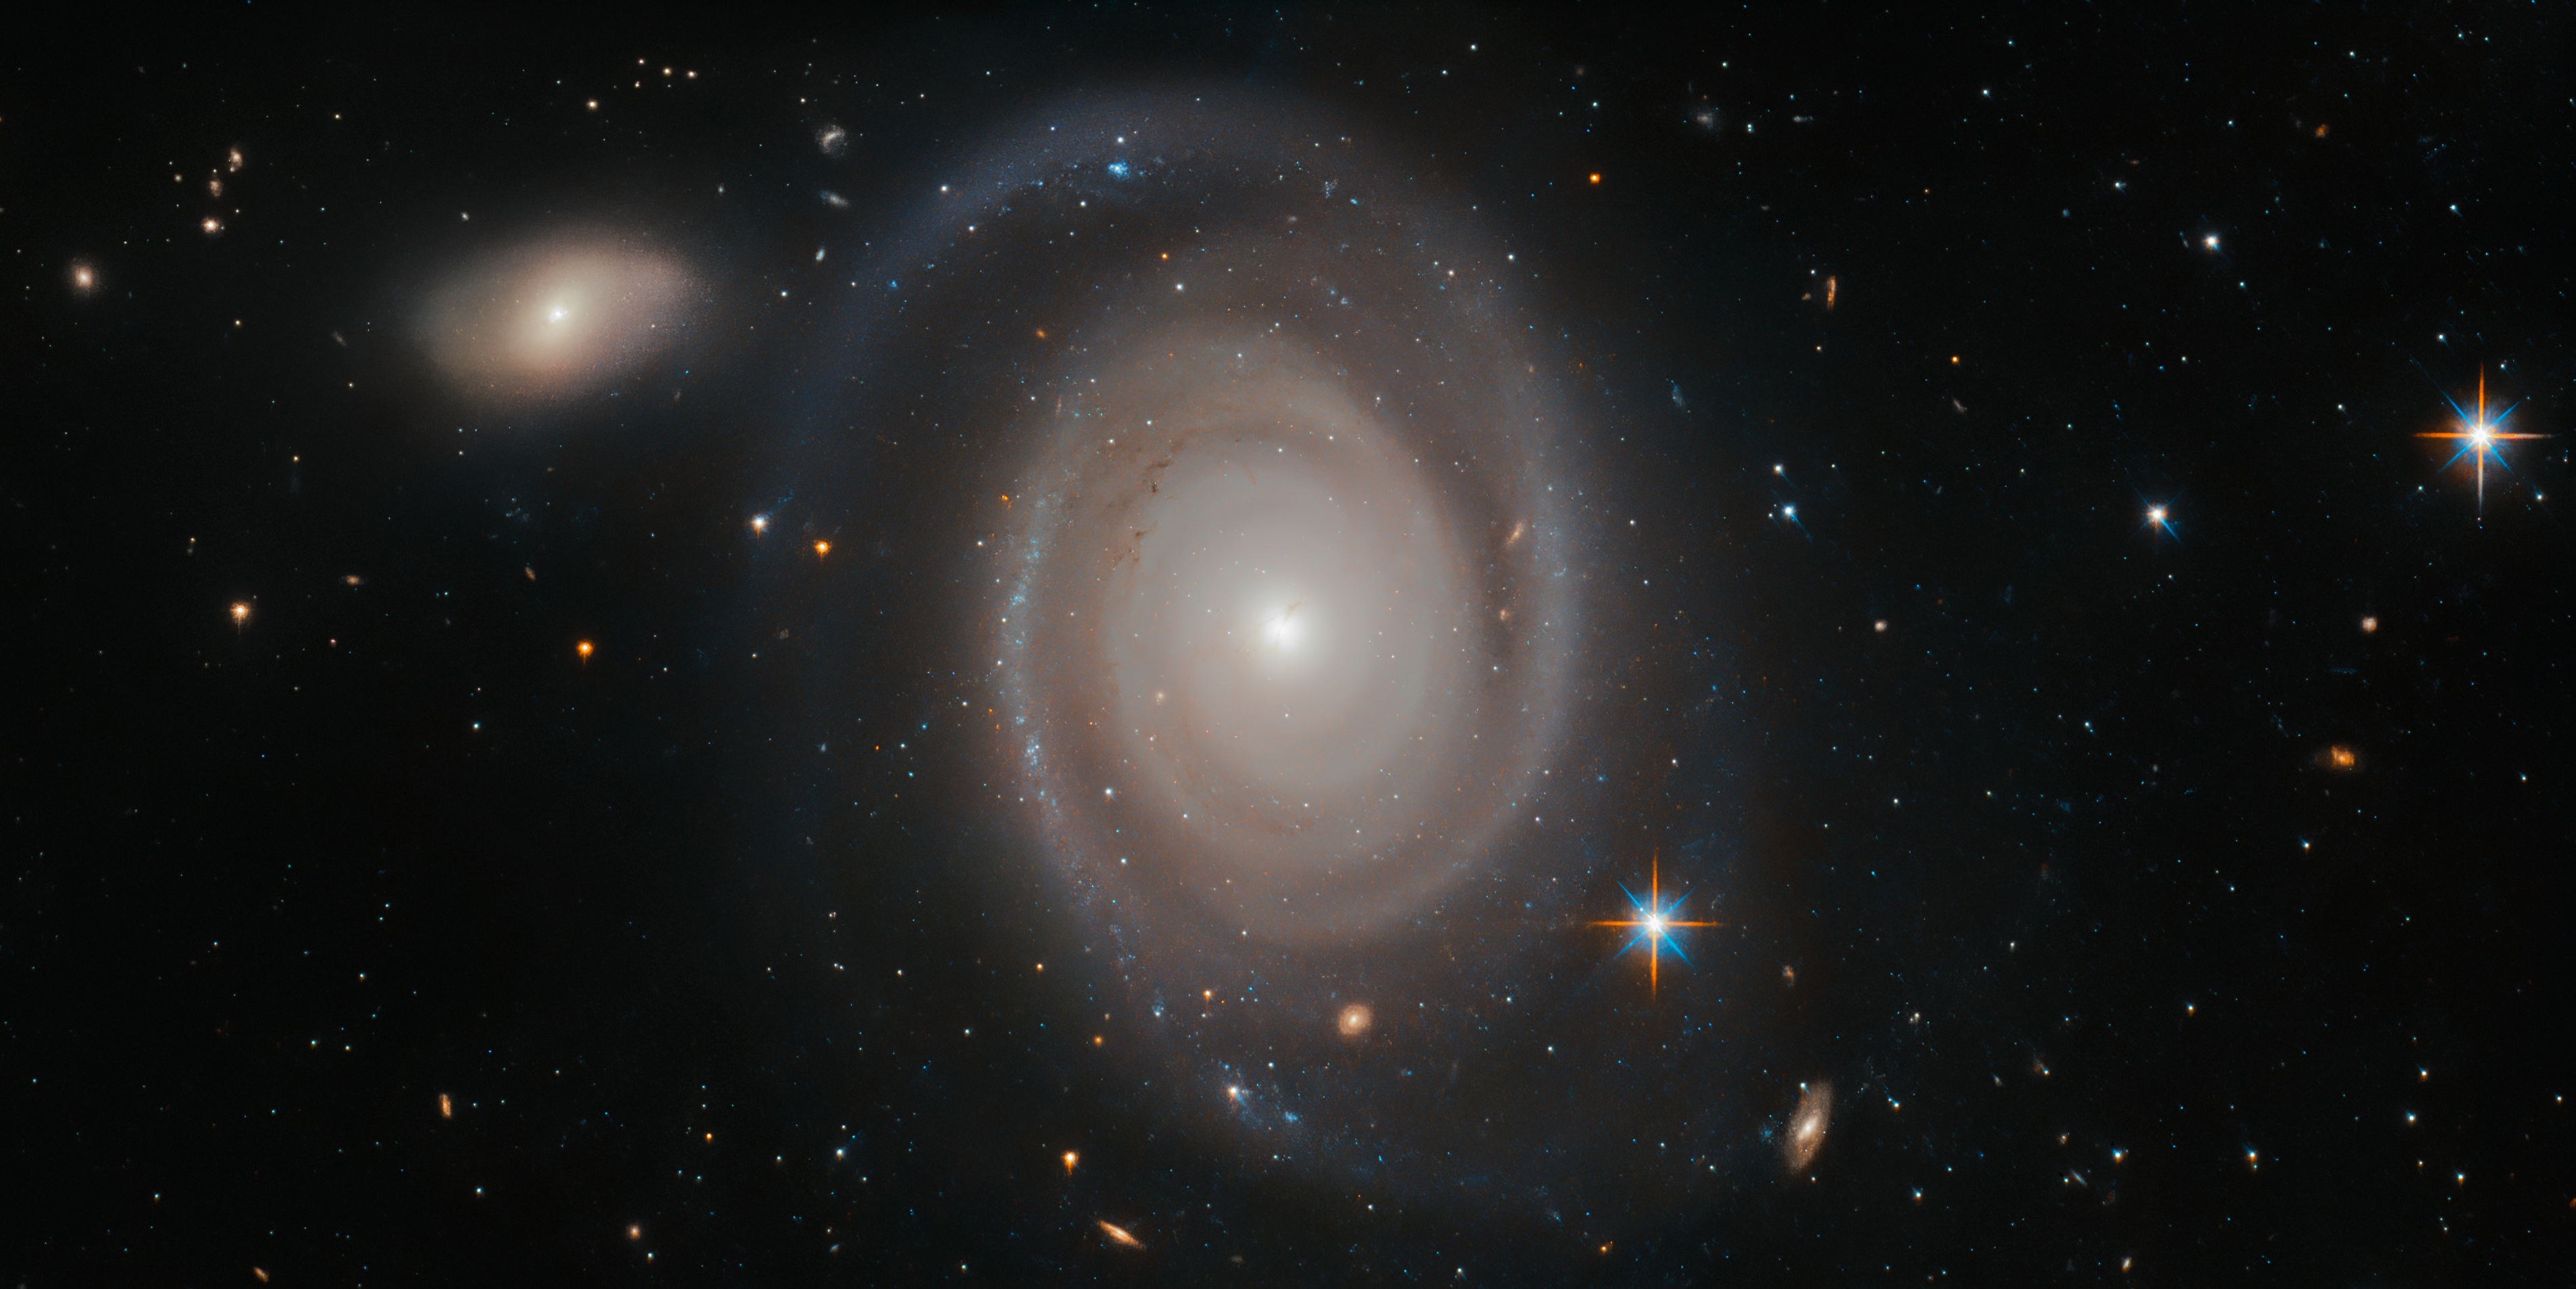

Lonely Hearts Club

Galaxies may seem lonely, floating alone in the vast, inky blackness of the sparsely populated cosmos — but looks can be deceiving. The subject of this Picture of the Week, NGC 1706, is a good example of this. NGC 1706 is a spiral galaxy, about 230 million light-years away, in the constellation of Dorado (The Swordfish).

NGC 1706 is known to belong to something known as a galaxy group, which is just as the name suggests — a group of up to 50 galaxies which are gravitationally bound and hence relatively close to each other. Around half of the galaxies we know of in the Universe belong to some kind of group, making them incredibly common cosmic structures. Our home galaxy, the Milky Way, belongs to the Local Group, which also contains the Andromeda Galaxy, the Large and Small Magellanic Clouds, and the Triangulum Galaxy.

Groups are the smallest of galactic gatherings; others are clusters, which can comprise hundreds of thousands of galaxies bound loosely together by gravity, and subsequent superclusters, which bring together numerous clusters into a single entity.

Credit: ESA/Hubble & NASA, A. Bellini et al.